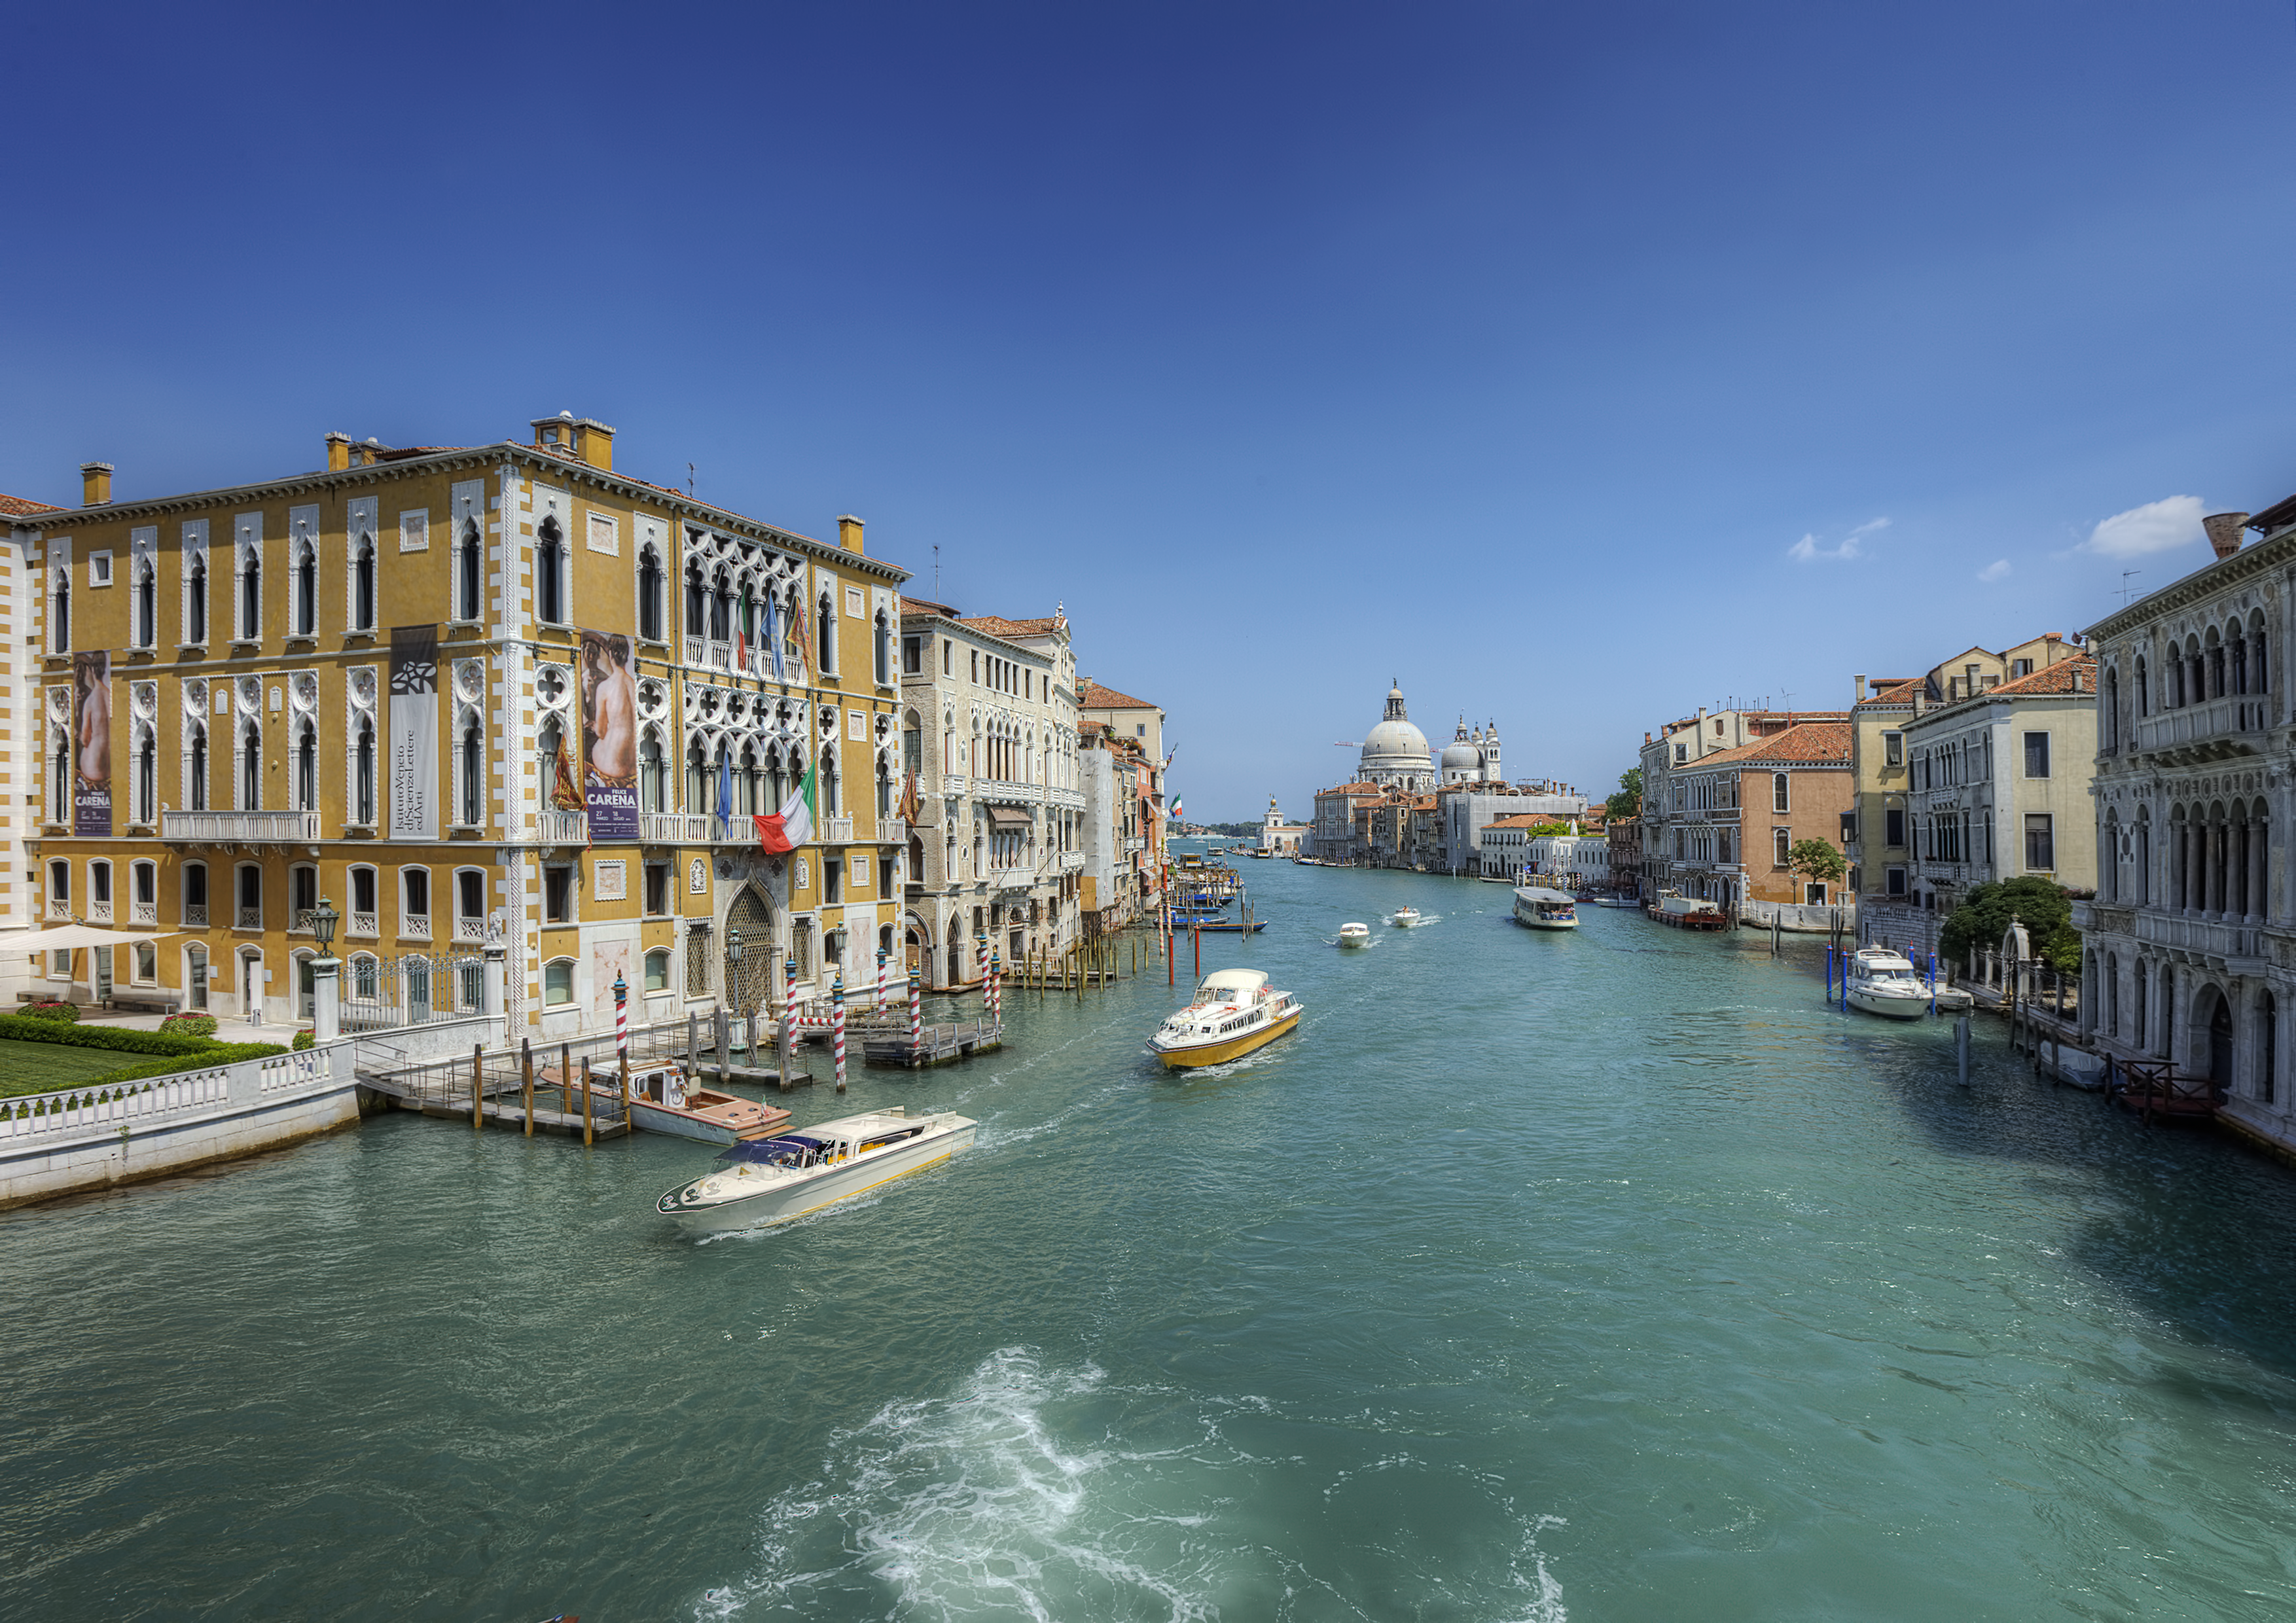

Palazzo Franchetti

The Our Place in Space exhibition will be shown from 1 February to 17 April 2017 in the Istituto Veneto di Scienze, Lettere ed Arti, Palazzo Cavalli Franchetti, on the banks of the Grand Canal.

Credit: ESA & Bob Fosbury